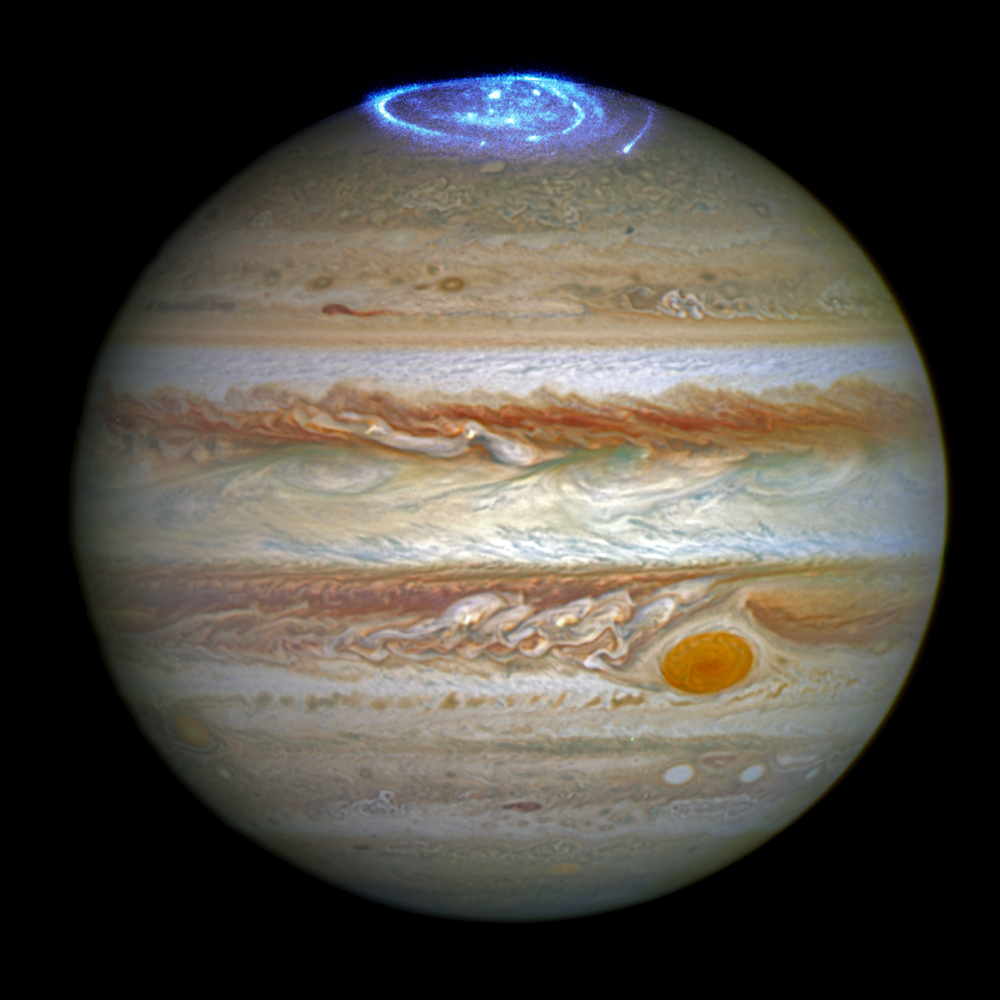

Auroras on Jupiter in 2014

This image combines an image taken with Hubble Space Telescope in the optical (taken in spring 2014) and observations of its auroras in the ultraviolet, taken in 2016.

Credit: NASA, ESA